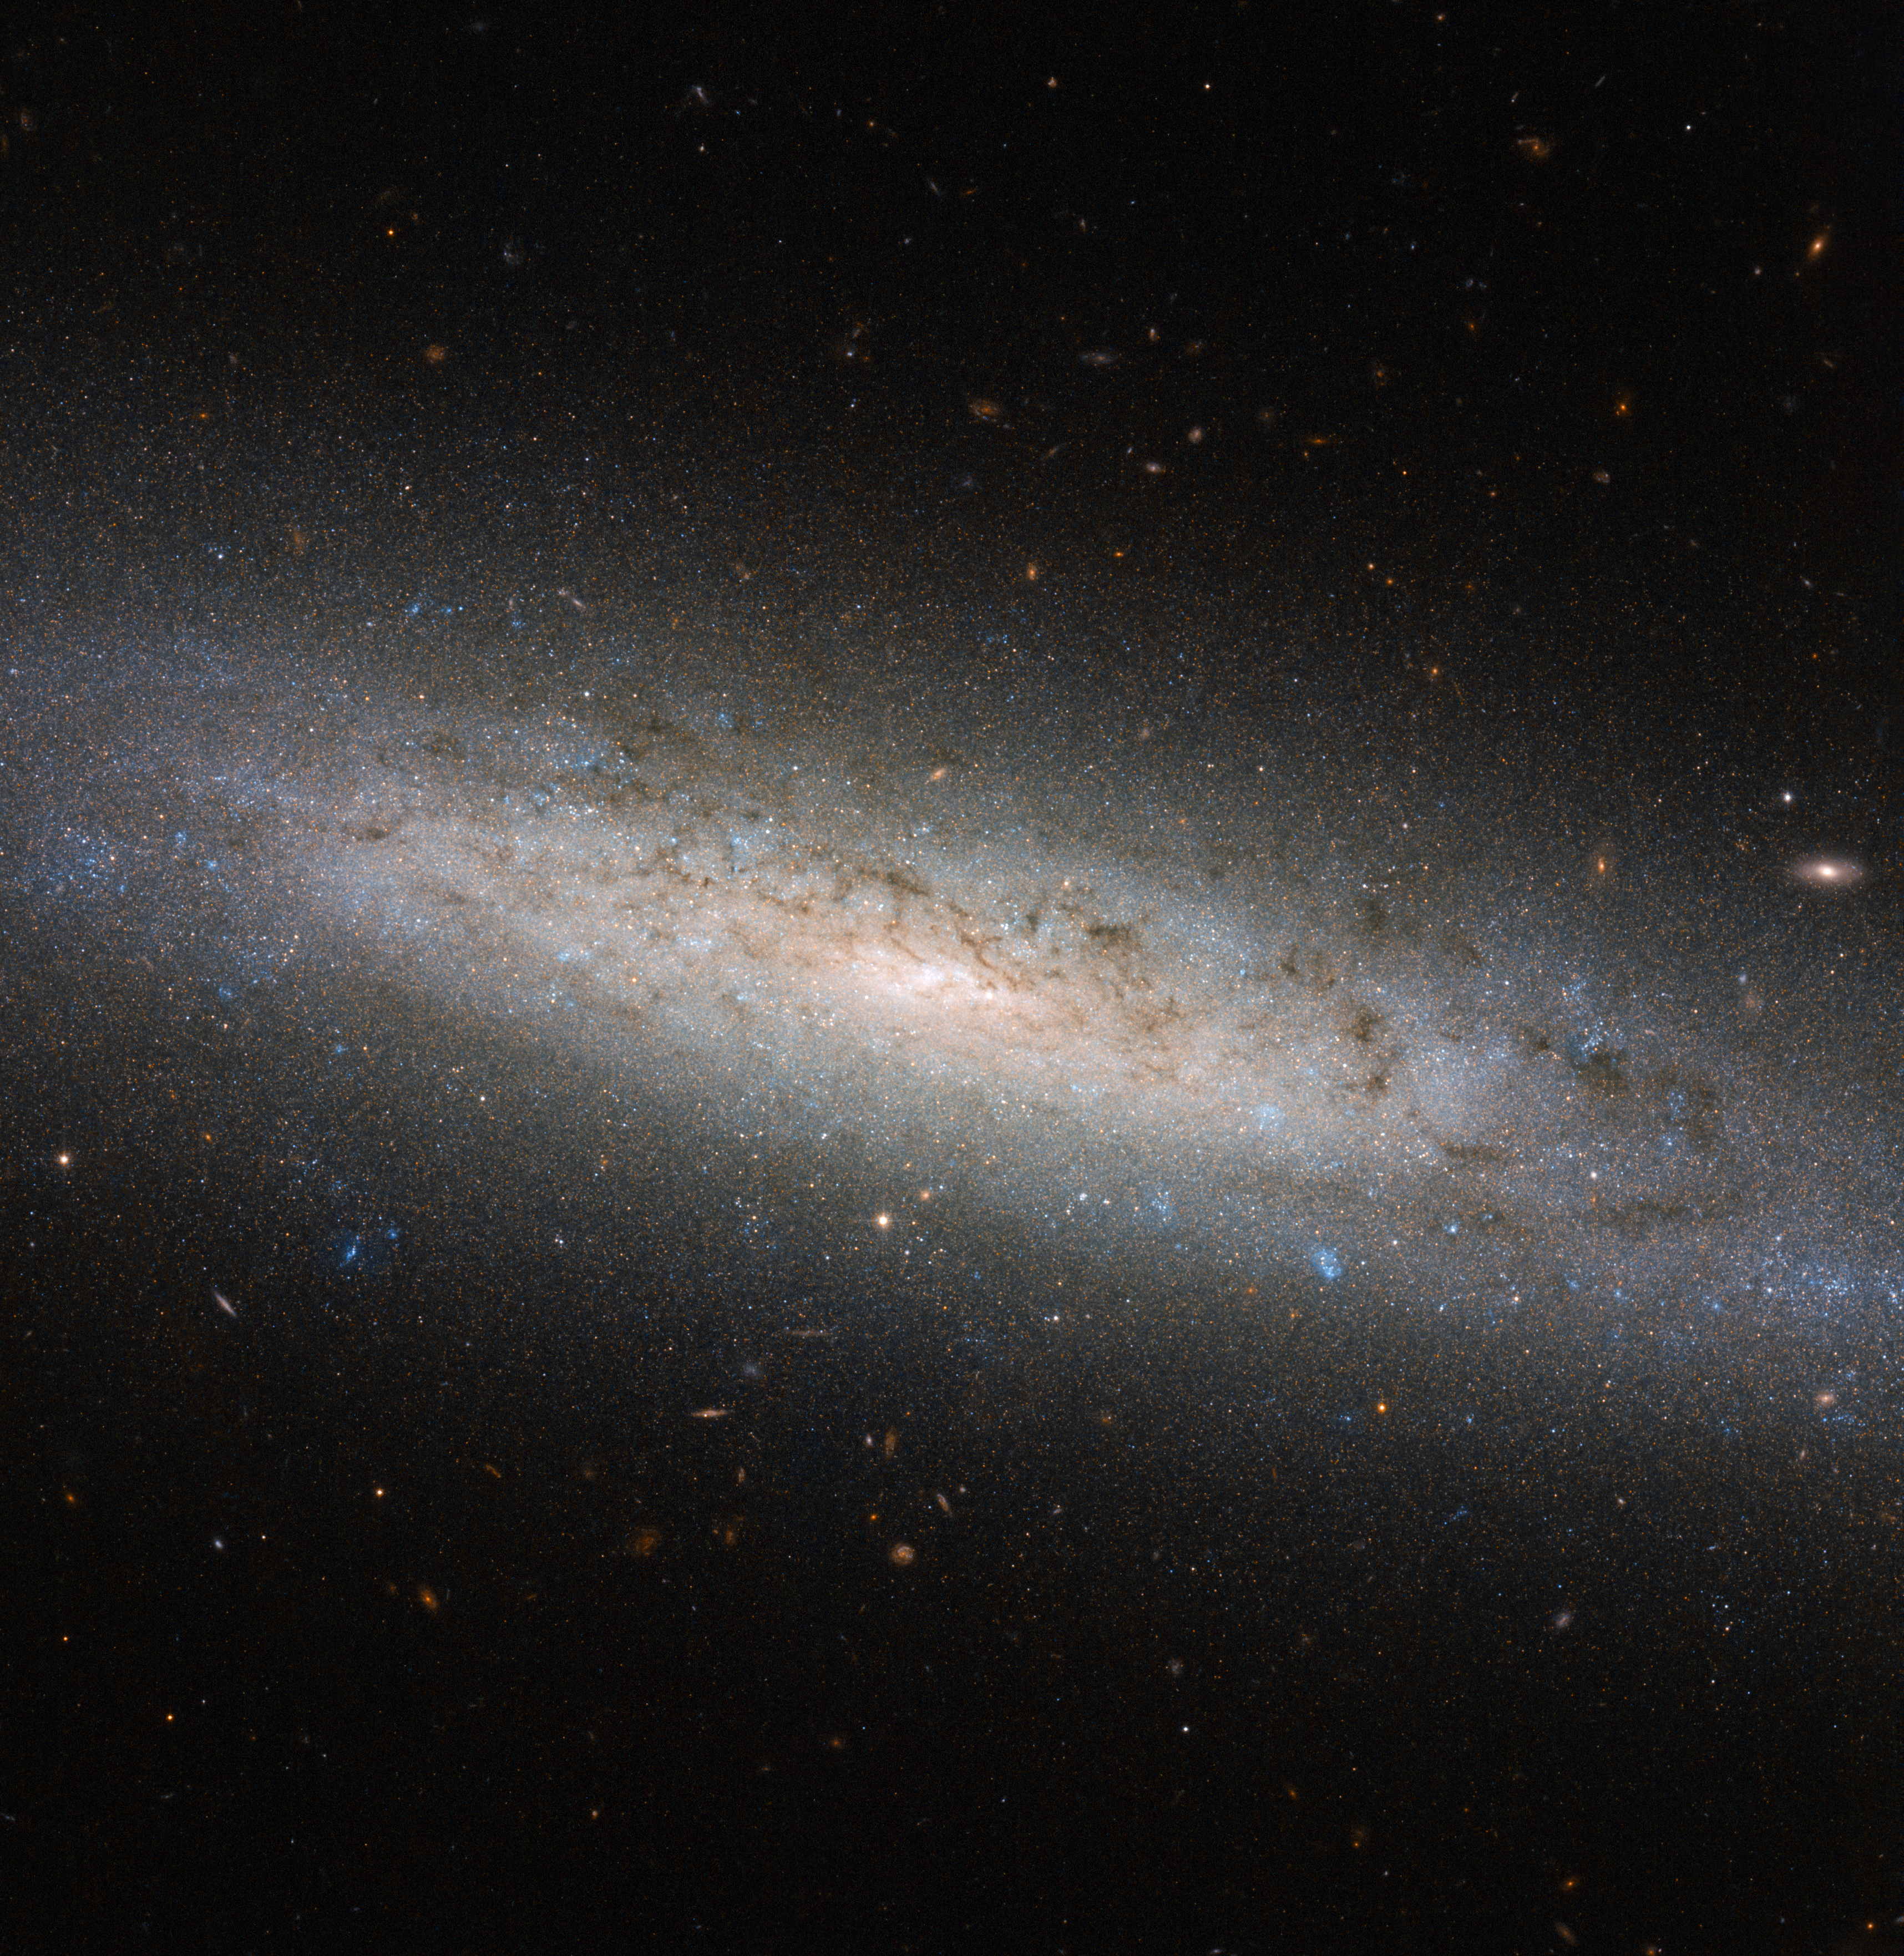

The hidden dark side of NGC 24

This shining disc of a spiral galaxy sits approximately 25 million light-years away from Earth in the constellation of Sculptor. Named NGC 24, the galaxy was discovered by British astronomer William Herschel in 1785, and measures some 40 000 light-years across.

This picture was taken using the NASA/ESA Hubble Space Telescope’s Advanced Camera for Surveys, known as ACS for short. It shows NGC 24 in detail, highlighting the blue bursts (young stars), dark lanes (cosmic dust), and red bubbles (hydrogen gas) of material peppered throughout the galaxy’s spiral arms. Numerous distant galaxies can also been seen hovering around NGC 24’s perimeter.

However, there may be more to this picture than first meets the eye. Astronomers suspect that spiral galaxies like NGC 24 and the Milky Way are surrounded by, and contained within, extended haloes of dark matter. Dark matter is a mysterious substance that cannot be seen; instead, it reveals itself via its gravitational interactions with surrounding material. Its existence was originally proposed to explain why the outer parts of galaxies, including our own, rotate unexpectedly fast, but it is thought to also play an essential role in a galaxy’s formation and evolution. Most of NGC 24’s mass — a whopping 80 % — is thought to be held within such a dark halo.

Credit: ESA/Hubble & NASA